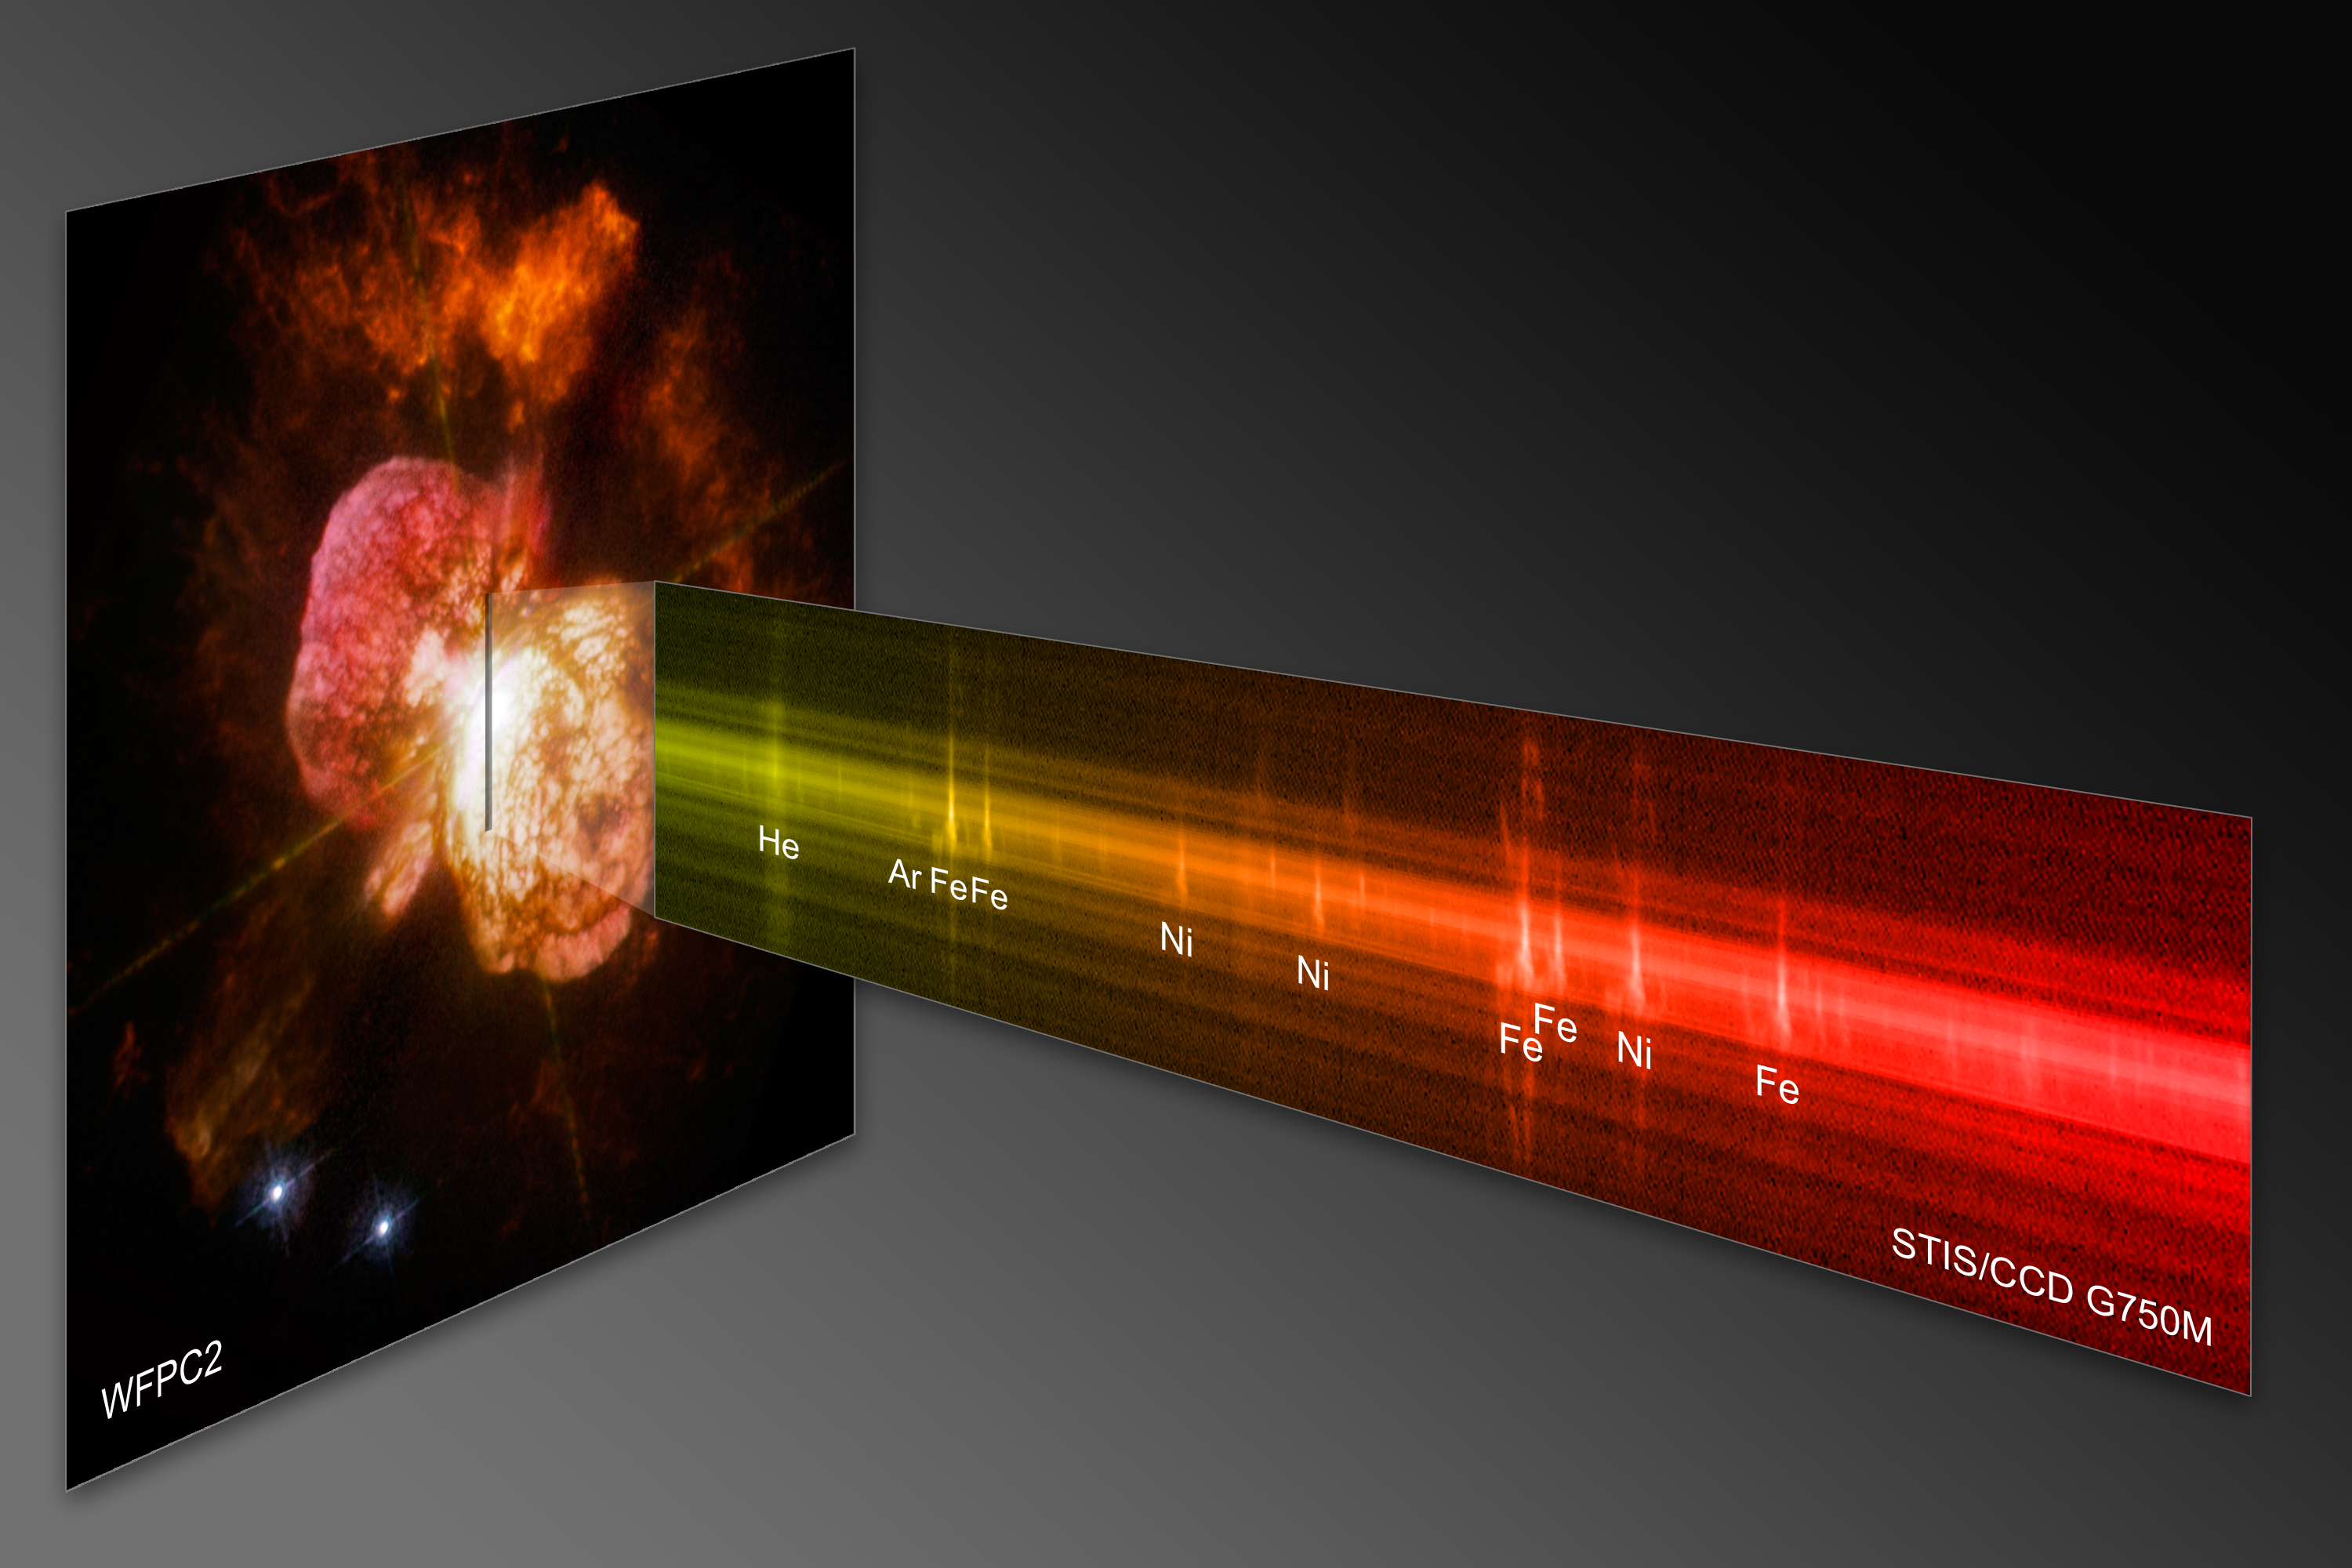

Probing the last gasps of the doomed star Eta Carinae

The signature balloon-shaped clouds of gas blown from a pair of massive stars called Eta Carinae have tantalised astronomers for decades. Eta Carinae has a volatile temperament, and has been prone to violent outbursts over the past 200 years.

Observations by the newly repaired Space Telescope Imaging Spectrograph (STIS) aboard NASA's Hubble Space Telescope reveal a stream of charged particles from a massive stellar wind and some of the chemical elements that were ejected in the eruption seen in the middle of the nineteenth century.

STIS resolved the chemical information along a narrow section of one of the giant lobes of ejected material. In the resulting spectrum, iron and nitrogen define the outer material cast off in the nineteenth century from Eta Carinae. STIS also reveals the interior material being carried away by the ongoing wind from Eta Car A, the primary star. The amount of mass being carried away by the wind is the equivalent of one Sun every thousand years.

While this rate of "mass loss" may not sound very large, in fact it is an enormous rate relative to that in other stars of all types. A very faint structure, seen in argon, is evidence of an interaction between winds from Eta Car A and those of Eta Car B, the hotter, less massive, secondary star.

Eta Car A is one of the most massive and most visible stars in the sky. Because of the star's extremely high mass, it is unstable and uses its fuel very quickly, compared to other stars. Such massive stars also have a short lifetime and astronomers expect that Eta Carinae will explode within a million years.

Eta Carinae was first catalogued by Edmund Halley in 1677. In 1843 Eta Carinae was one of the brightest stars in the sky. It then slowly faded until, in 1868, it became invisible in the sky. Eta Carinae started to brighten again in the 1990s and was again visible to the naked eye. Around 1998 and 1999 its brightness suddenly and unexpectedly doubled.

Eta Carinae is 7500 light-years away in the constellation of Carina.

The Hubble observations are part of the Hubble Servicing Mission 4 Early Release Observations. NASA astronauts repaired STIS during a servicing mission in May to upgrade and repair the 19-year-old Hubble telescope.

Credit: NASA, ESA and the Hubble SM4 ERO Team